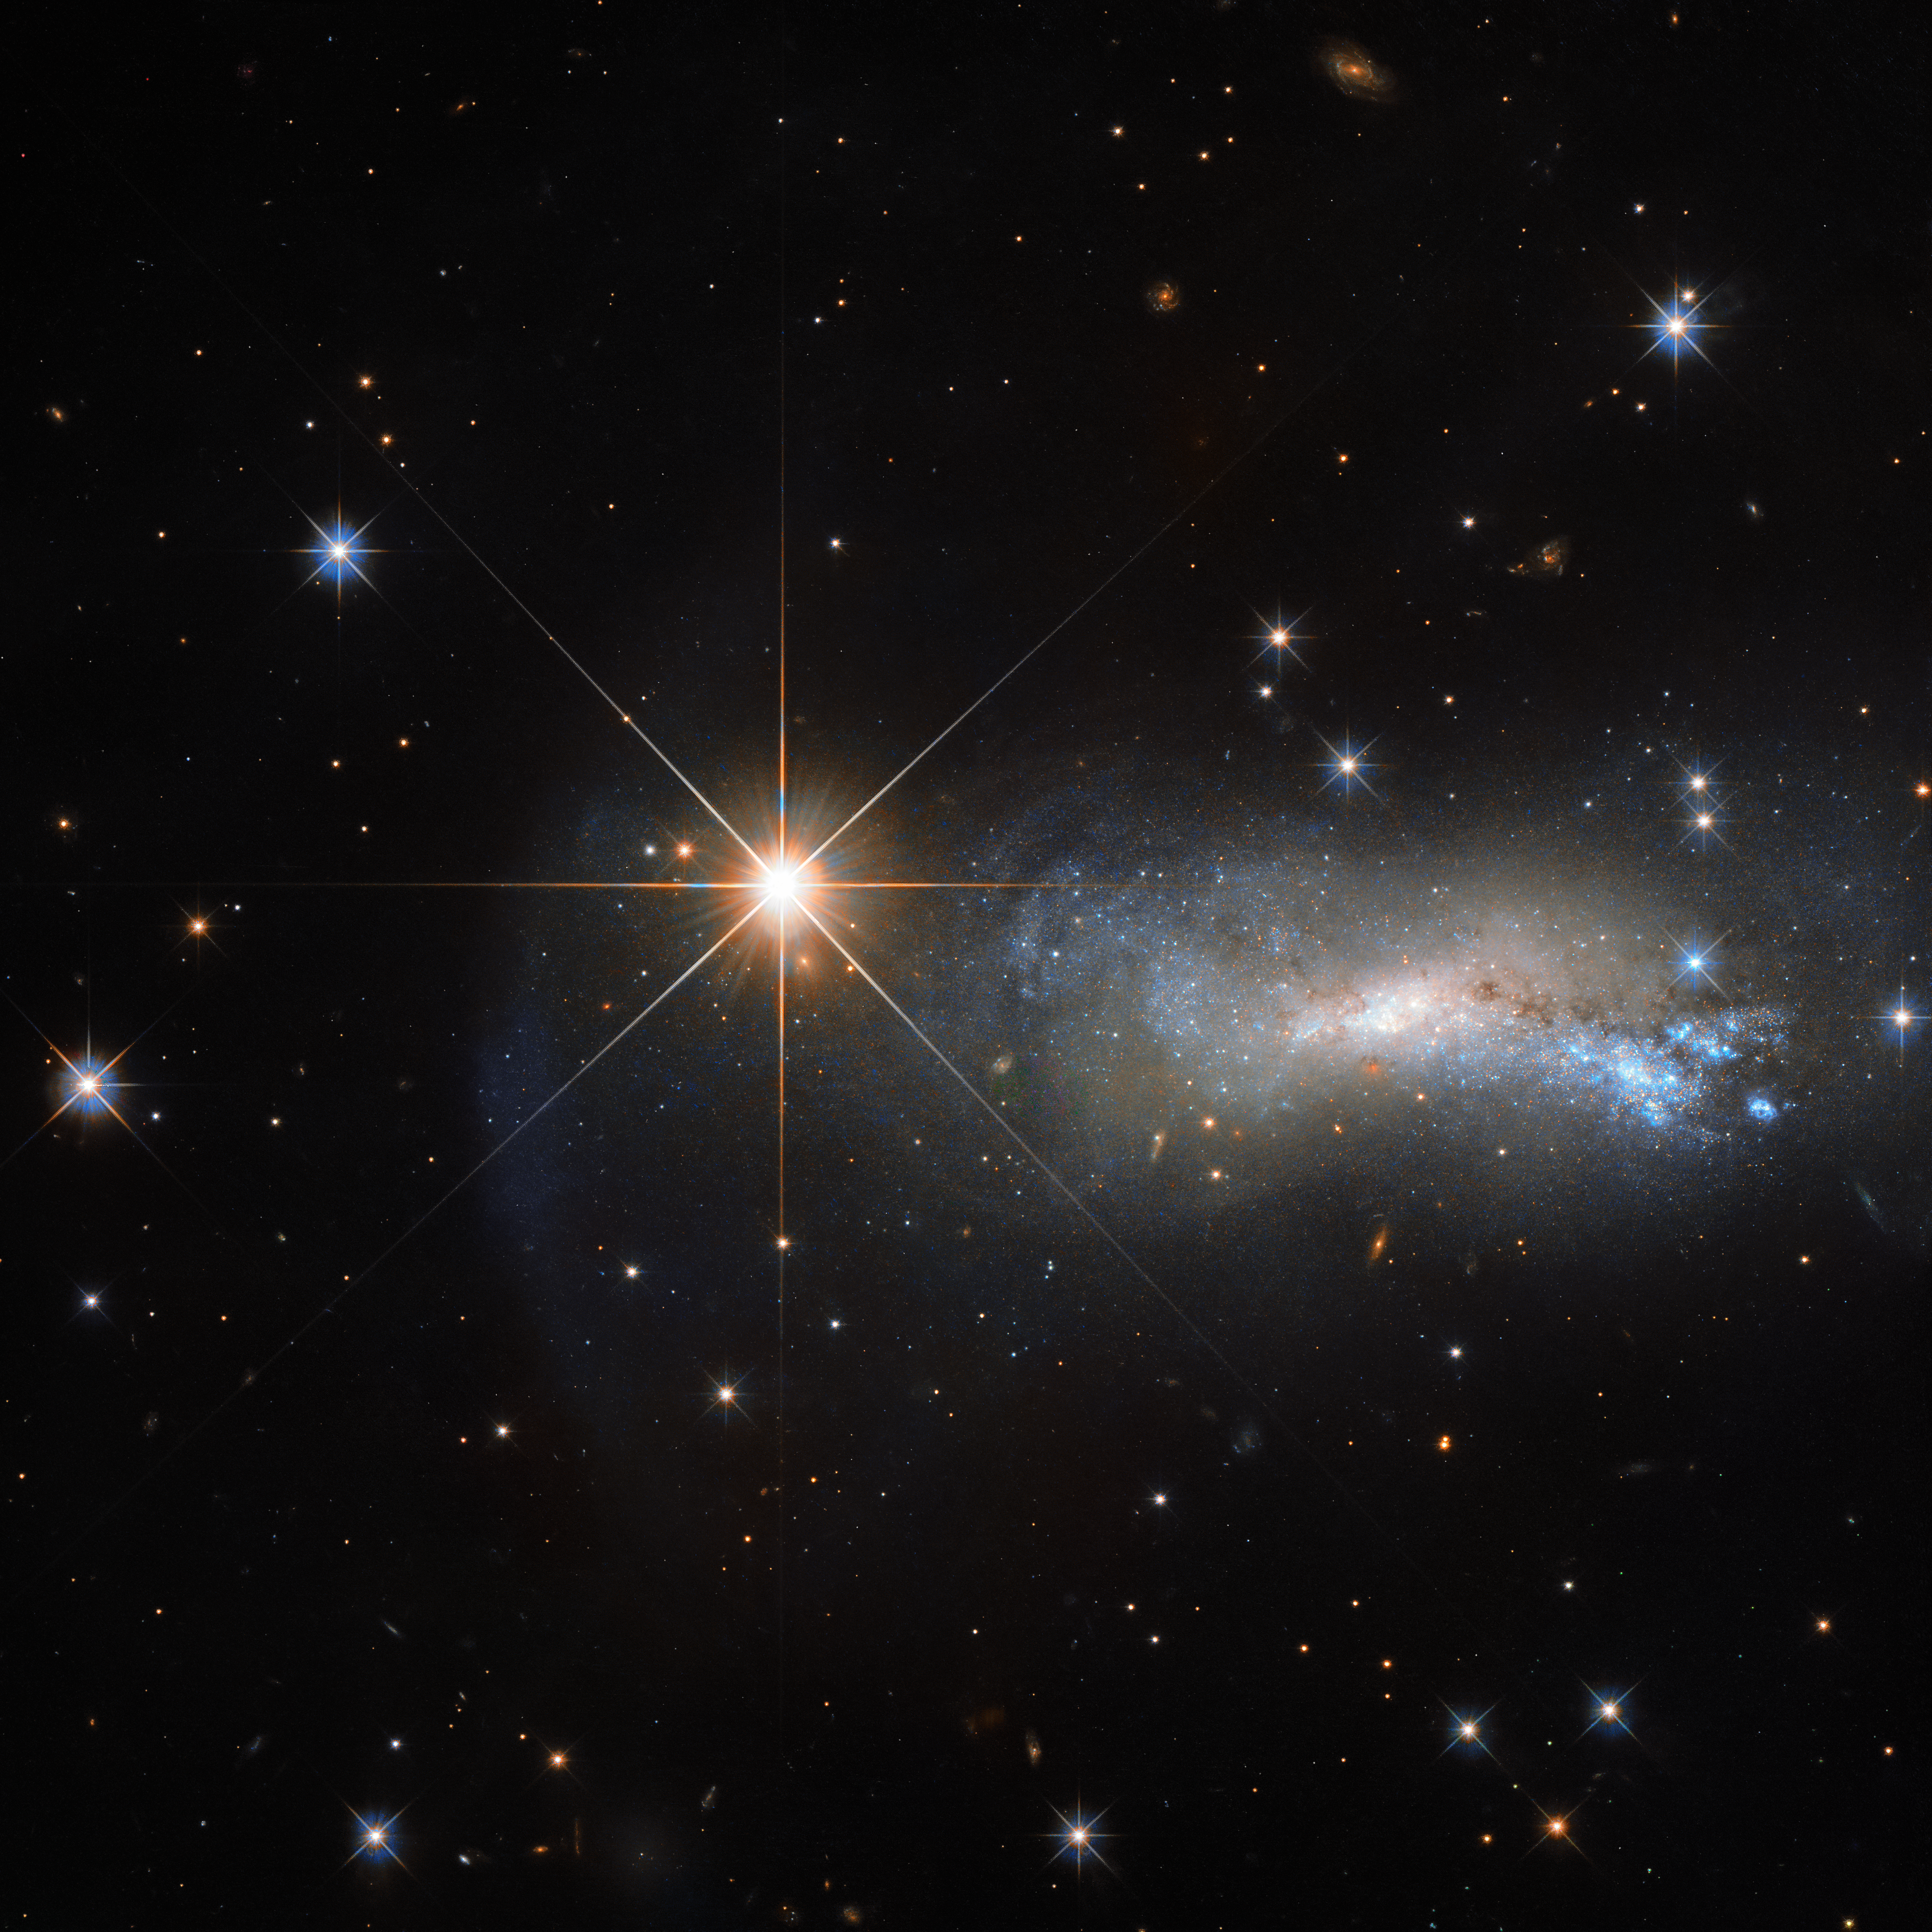

A matter of distance

In space, being outshone is an occupational hazard. This NASA/ESA Hubble Space Telescope image captures a galaxy named NGC 7250. Despite being remarkable in its own right — it has bright bursts of star formation and recorded supernova explosions — it blends into the background somewhat thanks to the gloriously bright star hogging the limelight next to it.

This bright object is a single and little-studied star named TYC 3203-450-1, located in the constellation of Lacerta (The Lizard), much closer than the much more distant galaxy. Only this way a normal star can outshine an entire galaxy, consisting of billions of stars. Astronomers studying distant objects call these stars “foreground stars” and they are often not very happy about them, as their bright light is contaminating the faint light from the more distant and interesting objects they actually want to study.

In this case TYC 3203-450-1 is around 7500 times closer to us than NGC 7250, which lies over 35 million light-years away. Were the star at the same distance as NGC 7250, it would hardly be visible in this image.

Editor's note (July 2024): The distance to TYC 3203-450-1 was corrected.

Credit: ESA/Hubble & NASA